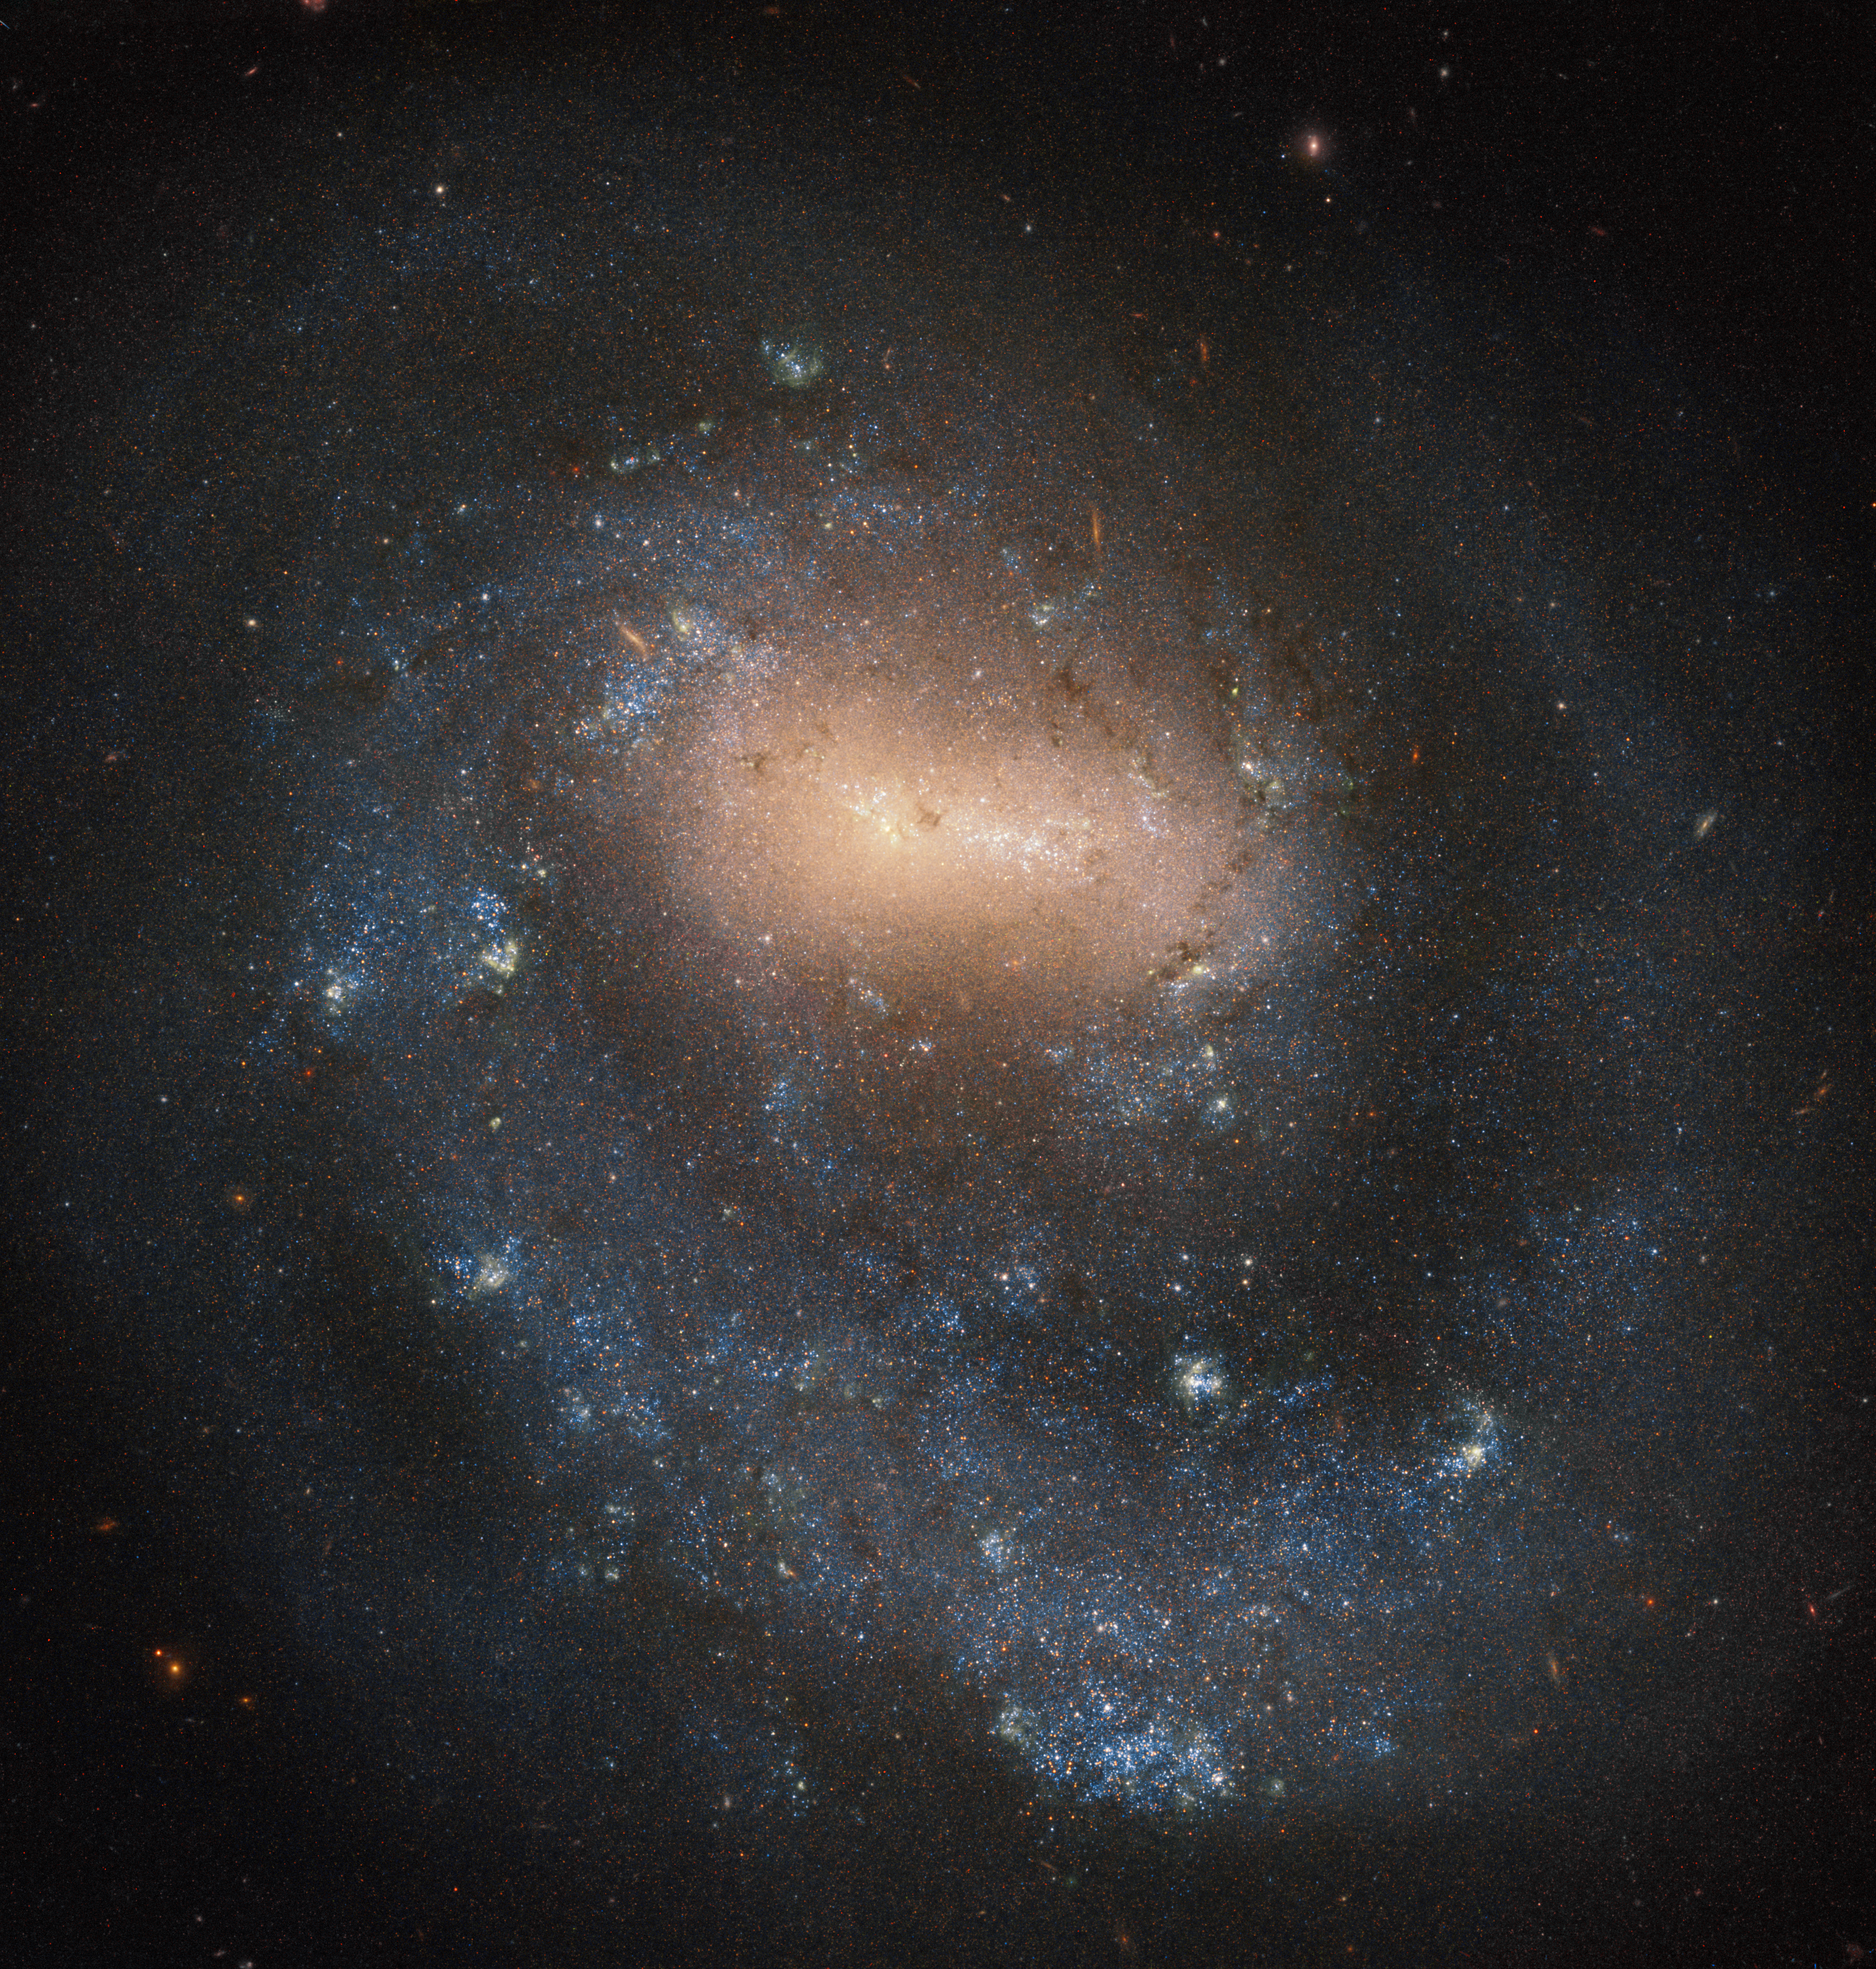

Single Arm Galaxy

NGC 4618 was discovered on 9 April 1787 by the German-British astronomer, Wilhelm Herschel, who also discovered Uranus in 1781. Only a year before discovering NGC 4618, Herschel theorised that the “foggy” objects astronomers were seeing in the night sky were likely to be large star clusters located much further away then the individual stars he could easily discern.

Since Herschel proposed his theory, astronomers have come to understand that what he was seeing was a galaxy. NGC 4618, classified as a barred spiral galaxy, has the special distinction amongst other spiral galaxies of only having one arm rotating around the centre of the galaxy.

Located about 21 million light-years from our galaxy in the constellation Canes Venatici, NGC 4618 has a diameter of about one third that of the Milky Way. Together with its neighbour, NGC 4625, it forms an interacting galaxy pair, which means that the two galaxies are close enough to influence each other gravitationally. These interactions may result in the two (or more) galaxies merging together to form a new formation, such as a ring galaxy.

Credit: ESA/Hubble & NASA, I. Karachentsev